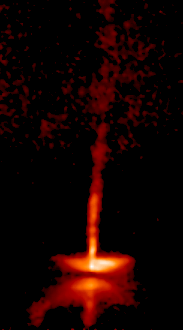

The dynamic HH-30 disk and jet (Frame 2)

This is how HH-30 looked in 1998.

Credit: NASA, Alan Watson (Universidad Nacional Autonoma de Mexico), Karl Stapelfeldt (Jet Propulsion Laboratory), John Krist and Chris Burrows (European Space Agency/ Space Telescope Science Institute).